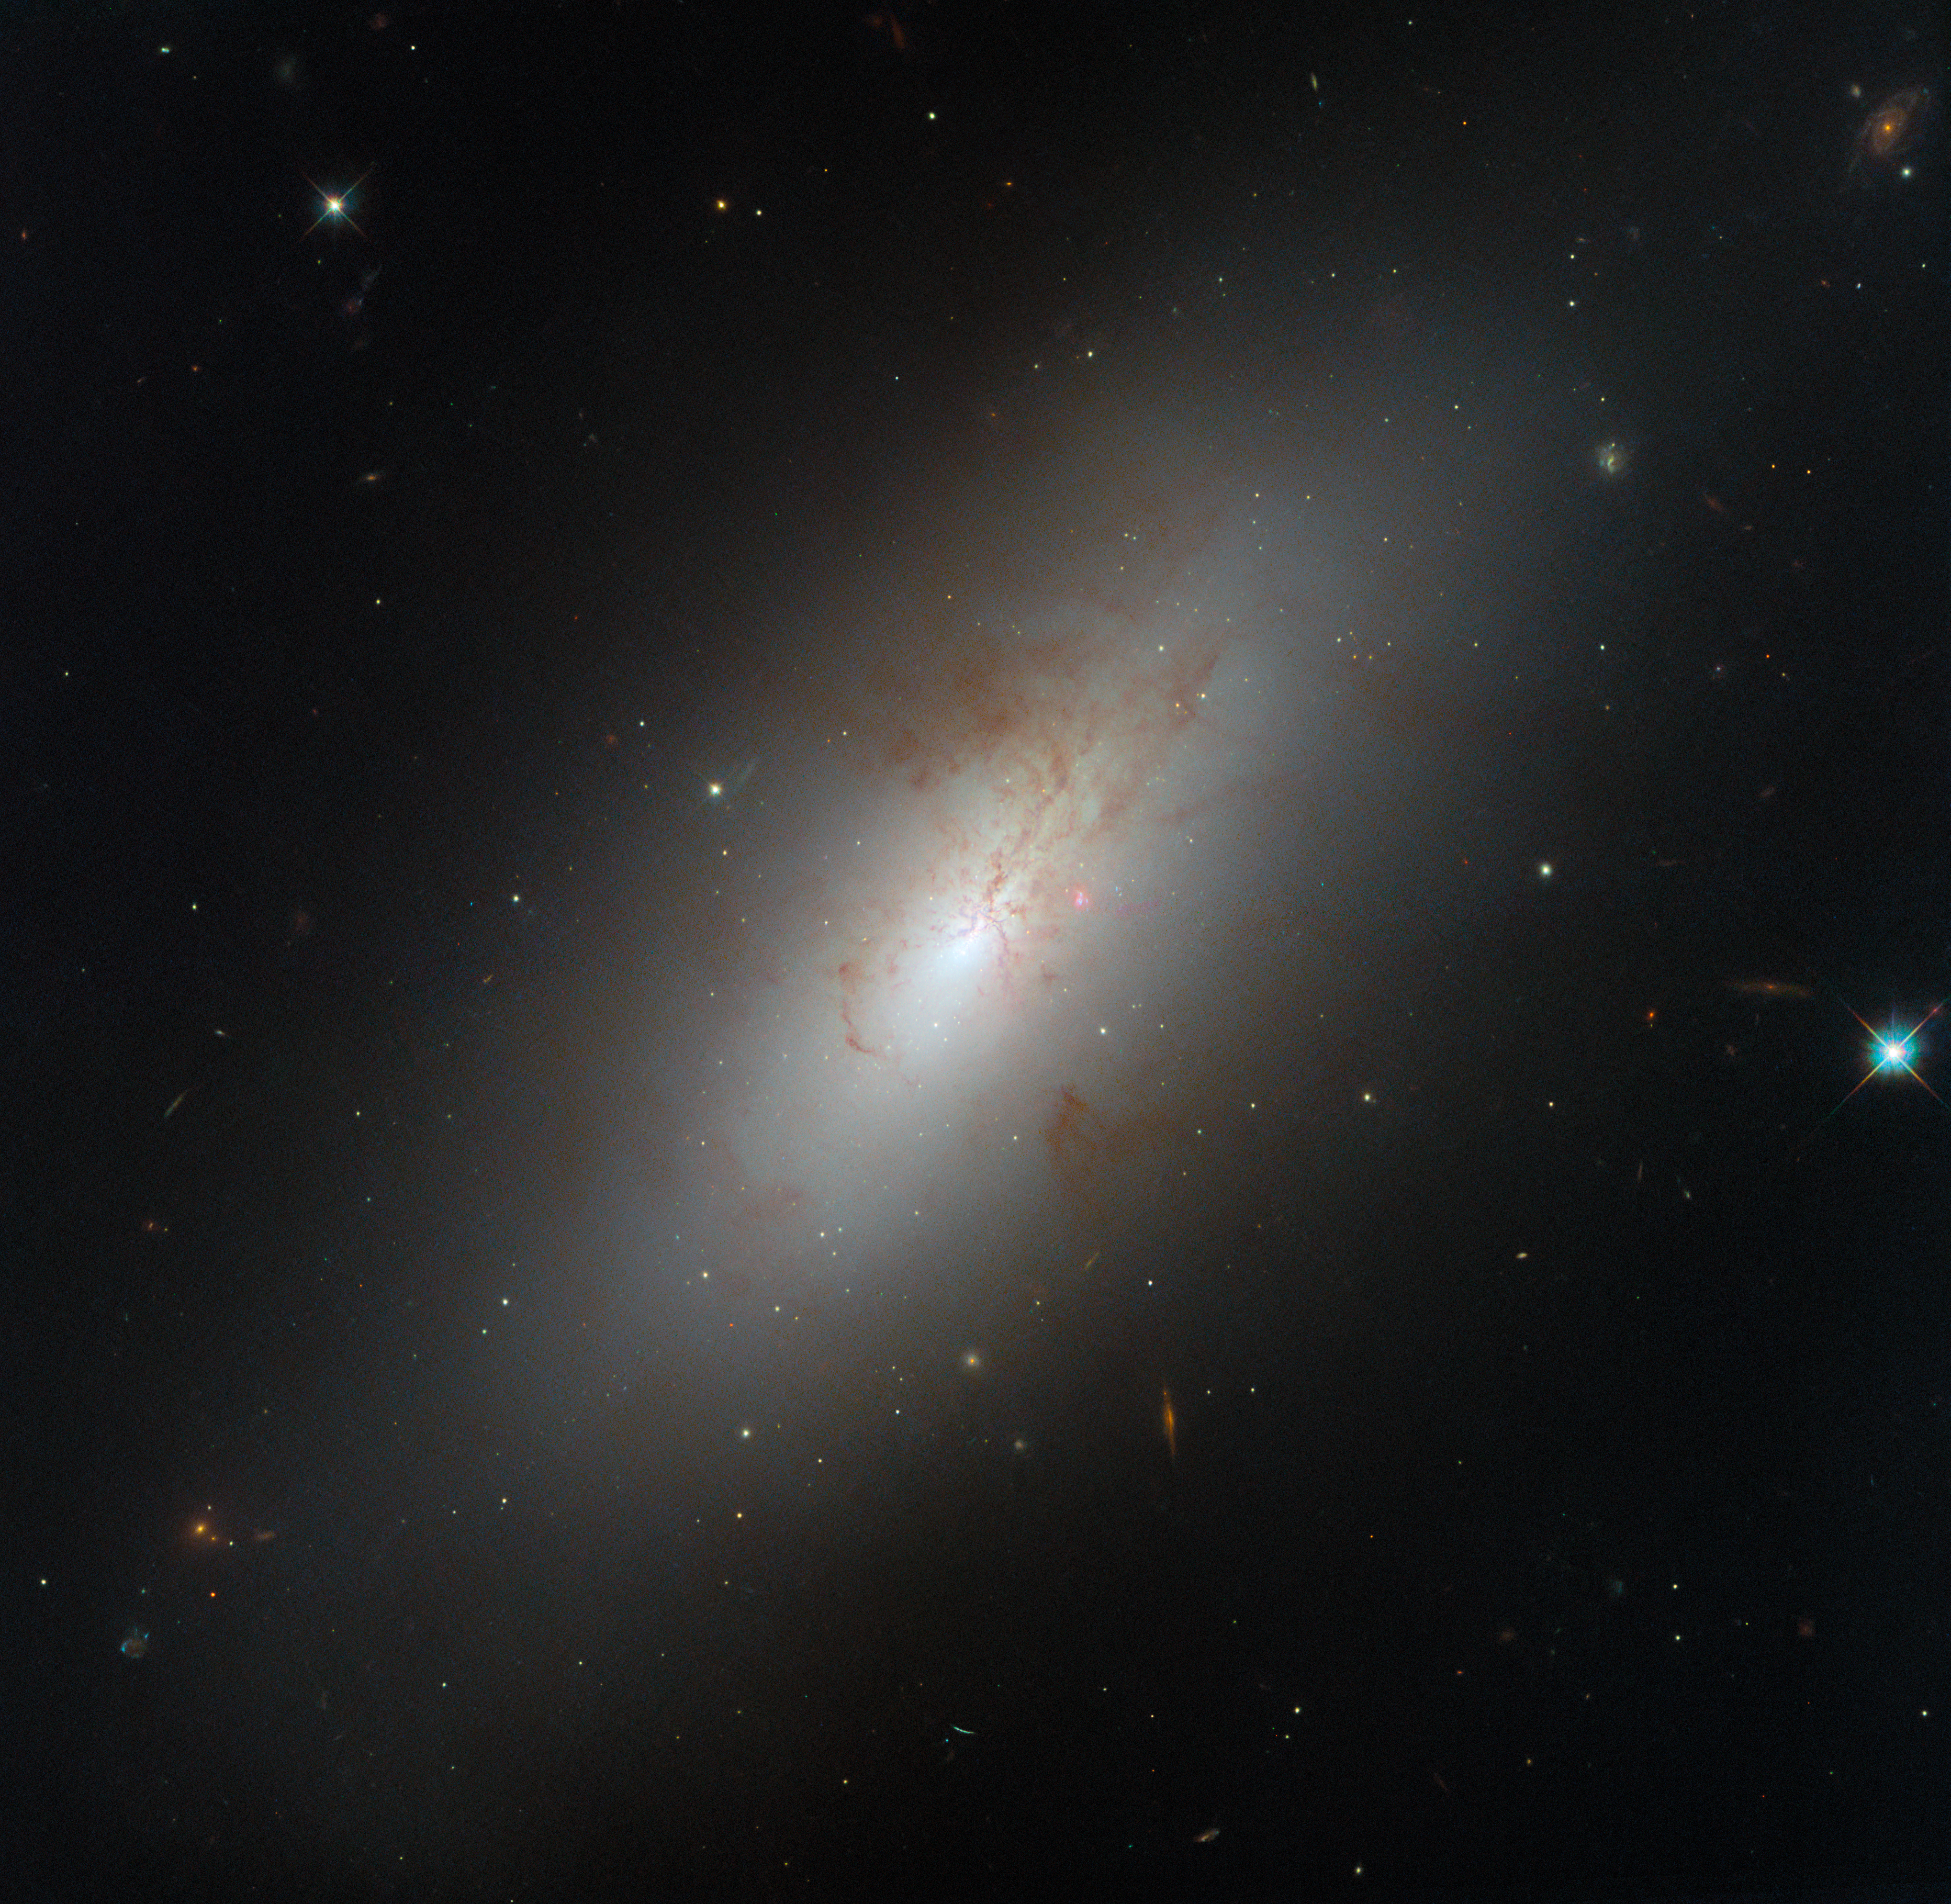

Playing against type

Most galaxies we are familiar with fall into one of two easily-identified types. Spiral galaxies are young and energetic, filled with the gas needed to form new stars and sporting spiral arms hosting hot, bright stars. Elliptical galaxies have a much more pedestrian look, their light coming from a uniform population of older and redder stars. But other galaxies require in-depth study to understand: such is the case with NGC 4694, a galaxy located 54 million light-years from Earth in the Virgo galaxy cluster, and the subject of this Hubble Picture of the Week.

NGC 4694 has a smooth-looking, armless disc which — like an elliptical galaxy — is nearly devoid of star formation. However its stellar population is still relatively young and new stars are still actively forming in its core, powering the brightness we can see in this image and giving it a markedly different stellar profile from that of a classic elliptical galaxy. The galaxy is also suffused by the kinds of gas and dust normally seen in a young and sprightly spiral; elliptical galaxies often do host significant quantities of dust, but not the gas needed to form new stars. NGC 4694 is surrounded by a huge cloud of invisible hydrogen gas, fuel for star formation. This stellar activity is the reason for Hubble’s observations here.

As this Hubble image shows, the dust in this galaxy forms chaotic structures that indicate some kind of disturbance. It turns out that the cloud of hydrogen gas around NGC 4694 forms a long bridge to a nearby, faint dwarf galaxy named VCC 2062. The two galaxies have undergone a violent collision, and the larger NGC 4694 is accreting gas from the smaller galaxy. Based on its peculiar shape and its star-forming activity, NGC 4694 has been classified as a lenticular galaxy: lacking the unmistakable arms of a spiral, but not so bereft of gas as an elliptical galaxy, and still with a galactic bulge and disc. Some galaxies just aren’t so easy to classify as one type or the other!

Credit: ESA/Hubble & NASA, D. Thilker